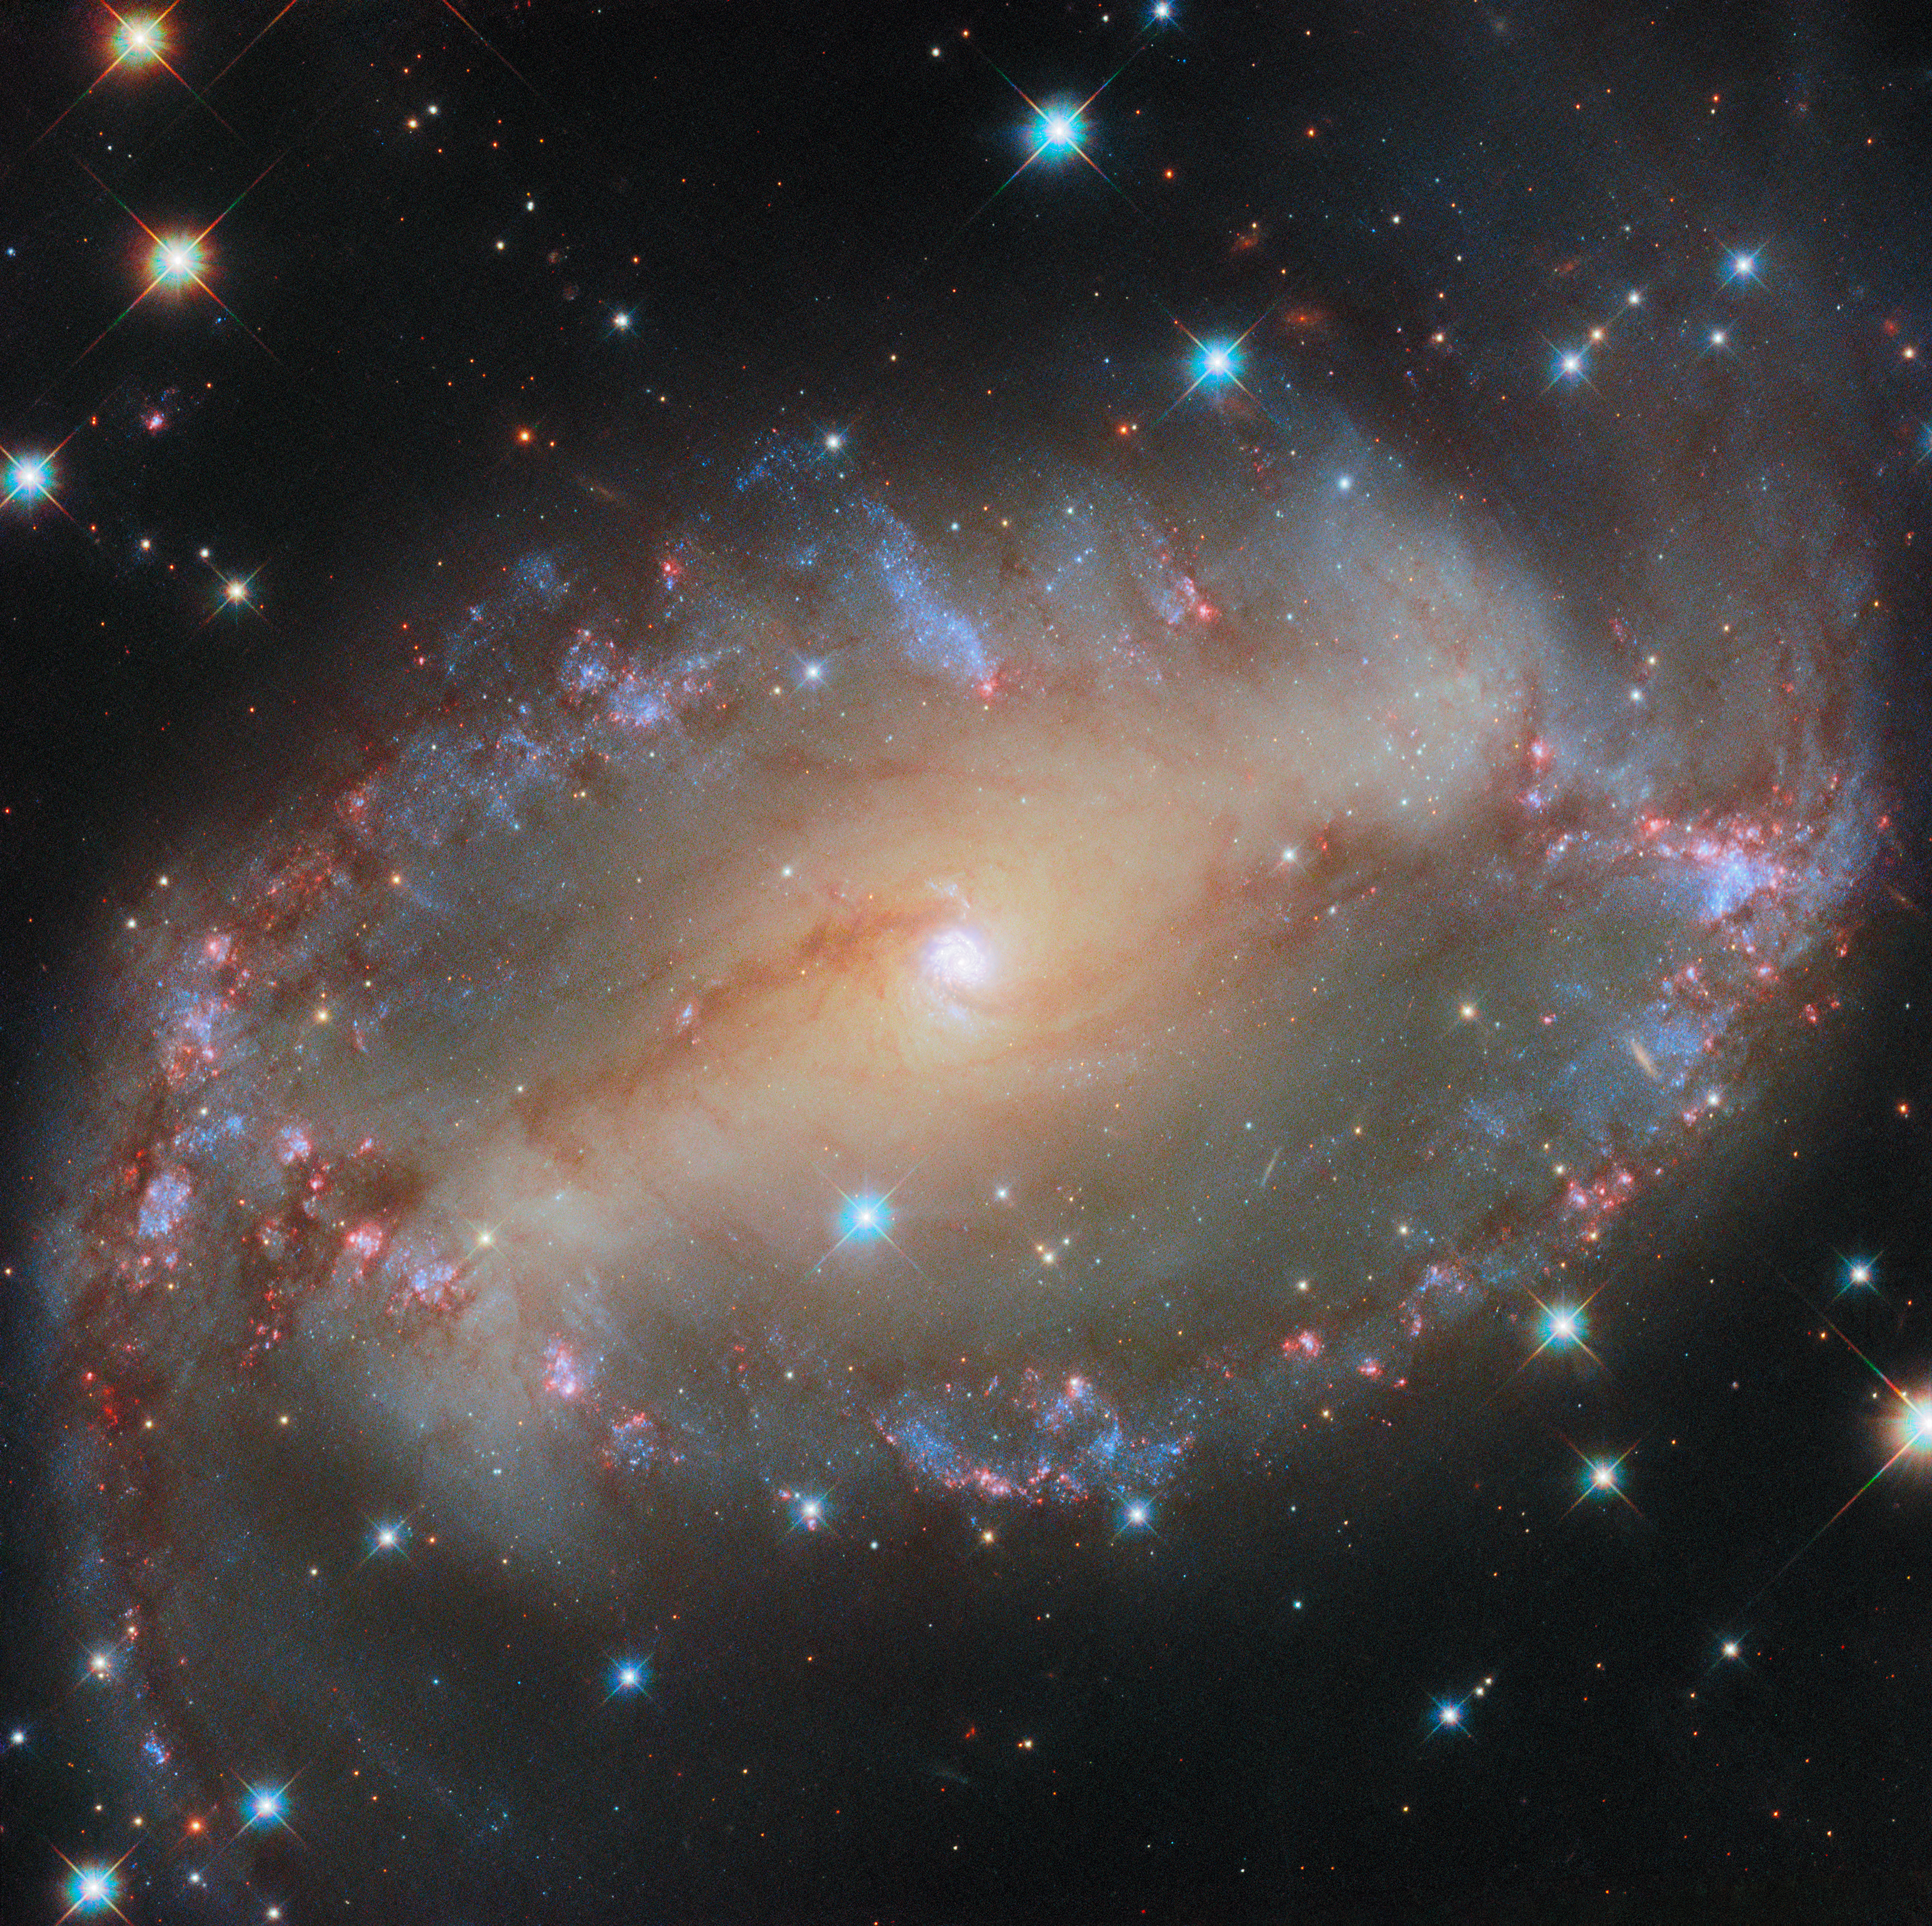

Seeing eye to eye

Featured in this NASA/ESA Hubble Space Telescope Picture of the Week is the spiral galaxy NGC 2566, which sits 76 million light-years away in the constellation Puppis. A prominent bar of stars stretches across the centre of this galaxy, and spiral arms emerge from each end of the bar. Because NGC 2566 appears tilted from our perspective, its disc takes on an almond shape, giving the galaxy the appearance of a cosmic eye.

As NGC 2566 gazes at us, astronomers gaze right back, using Hubble to survey the galaxy’s star clusters and star-forming regions. The Hubble data are especially valuable for studying stars that are just a few million years old; these stars are bright at the ultraviolet and visible wavelengths to which Hubble is sensitive. Using these data, researchers will measure the ages of NGC 2566’s stars, helping to piece together the timeline of the galaxy’s star formation and the exchange of gas between star-forming clouds and stars themselves.

Several other astronomical observatories have examined NGC 2566, including the NASA/ESA/CSA James Webb Space Telescope. The Webb data complement this Hubble image, adding a view of NGC 2566’s warm, glowing dust to Hubble’s stellar portrait. At the long-wavelength end of the electromagnetic spectrum, NGC 2566 has also been observed by the Atacama Large Millimeter/submillimeter Array (ALMA). ALMA is a network of 66 radio telescopes that work together as one to capture detailed images of the clouds of gas in which stars form. Together, Hubble, Webb and ALMA provide an overview of the formation, lives and deaths of stars in galaxies across the Universe.

Credit: ESA/Hubble & NASA, D. Thilker